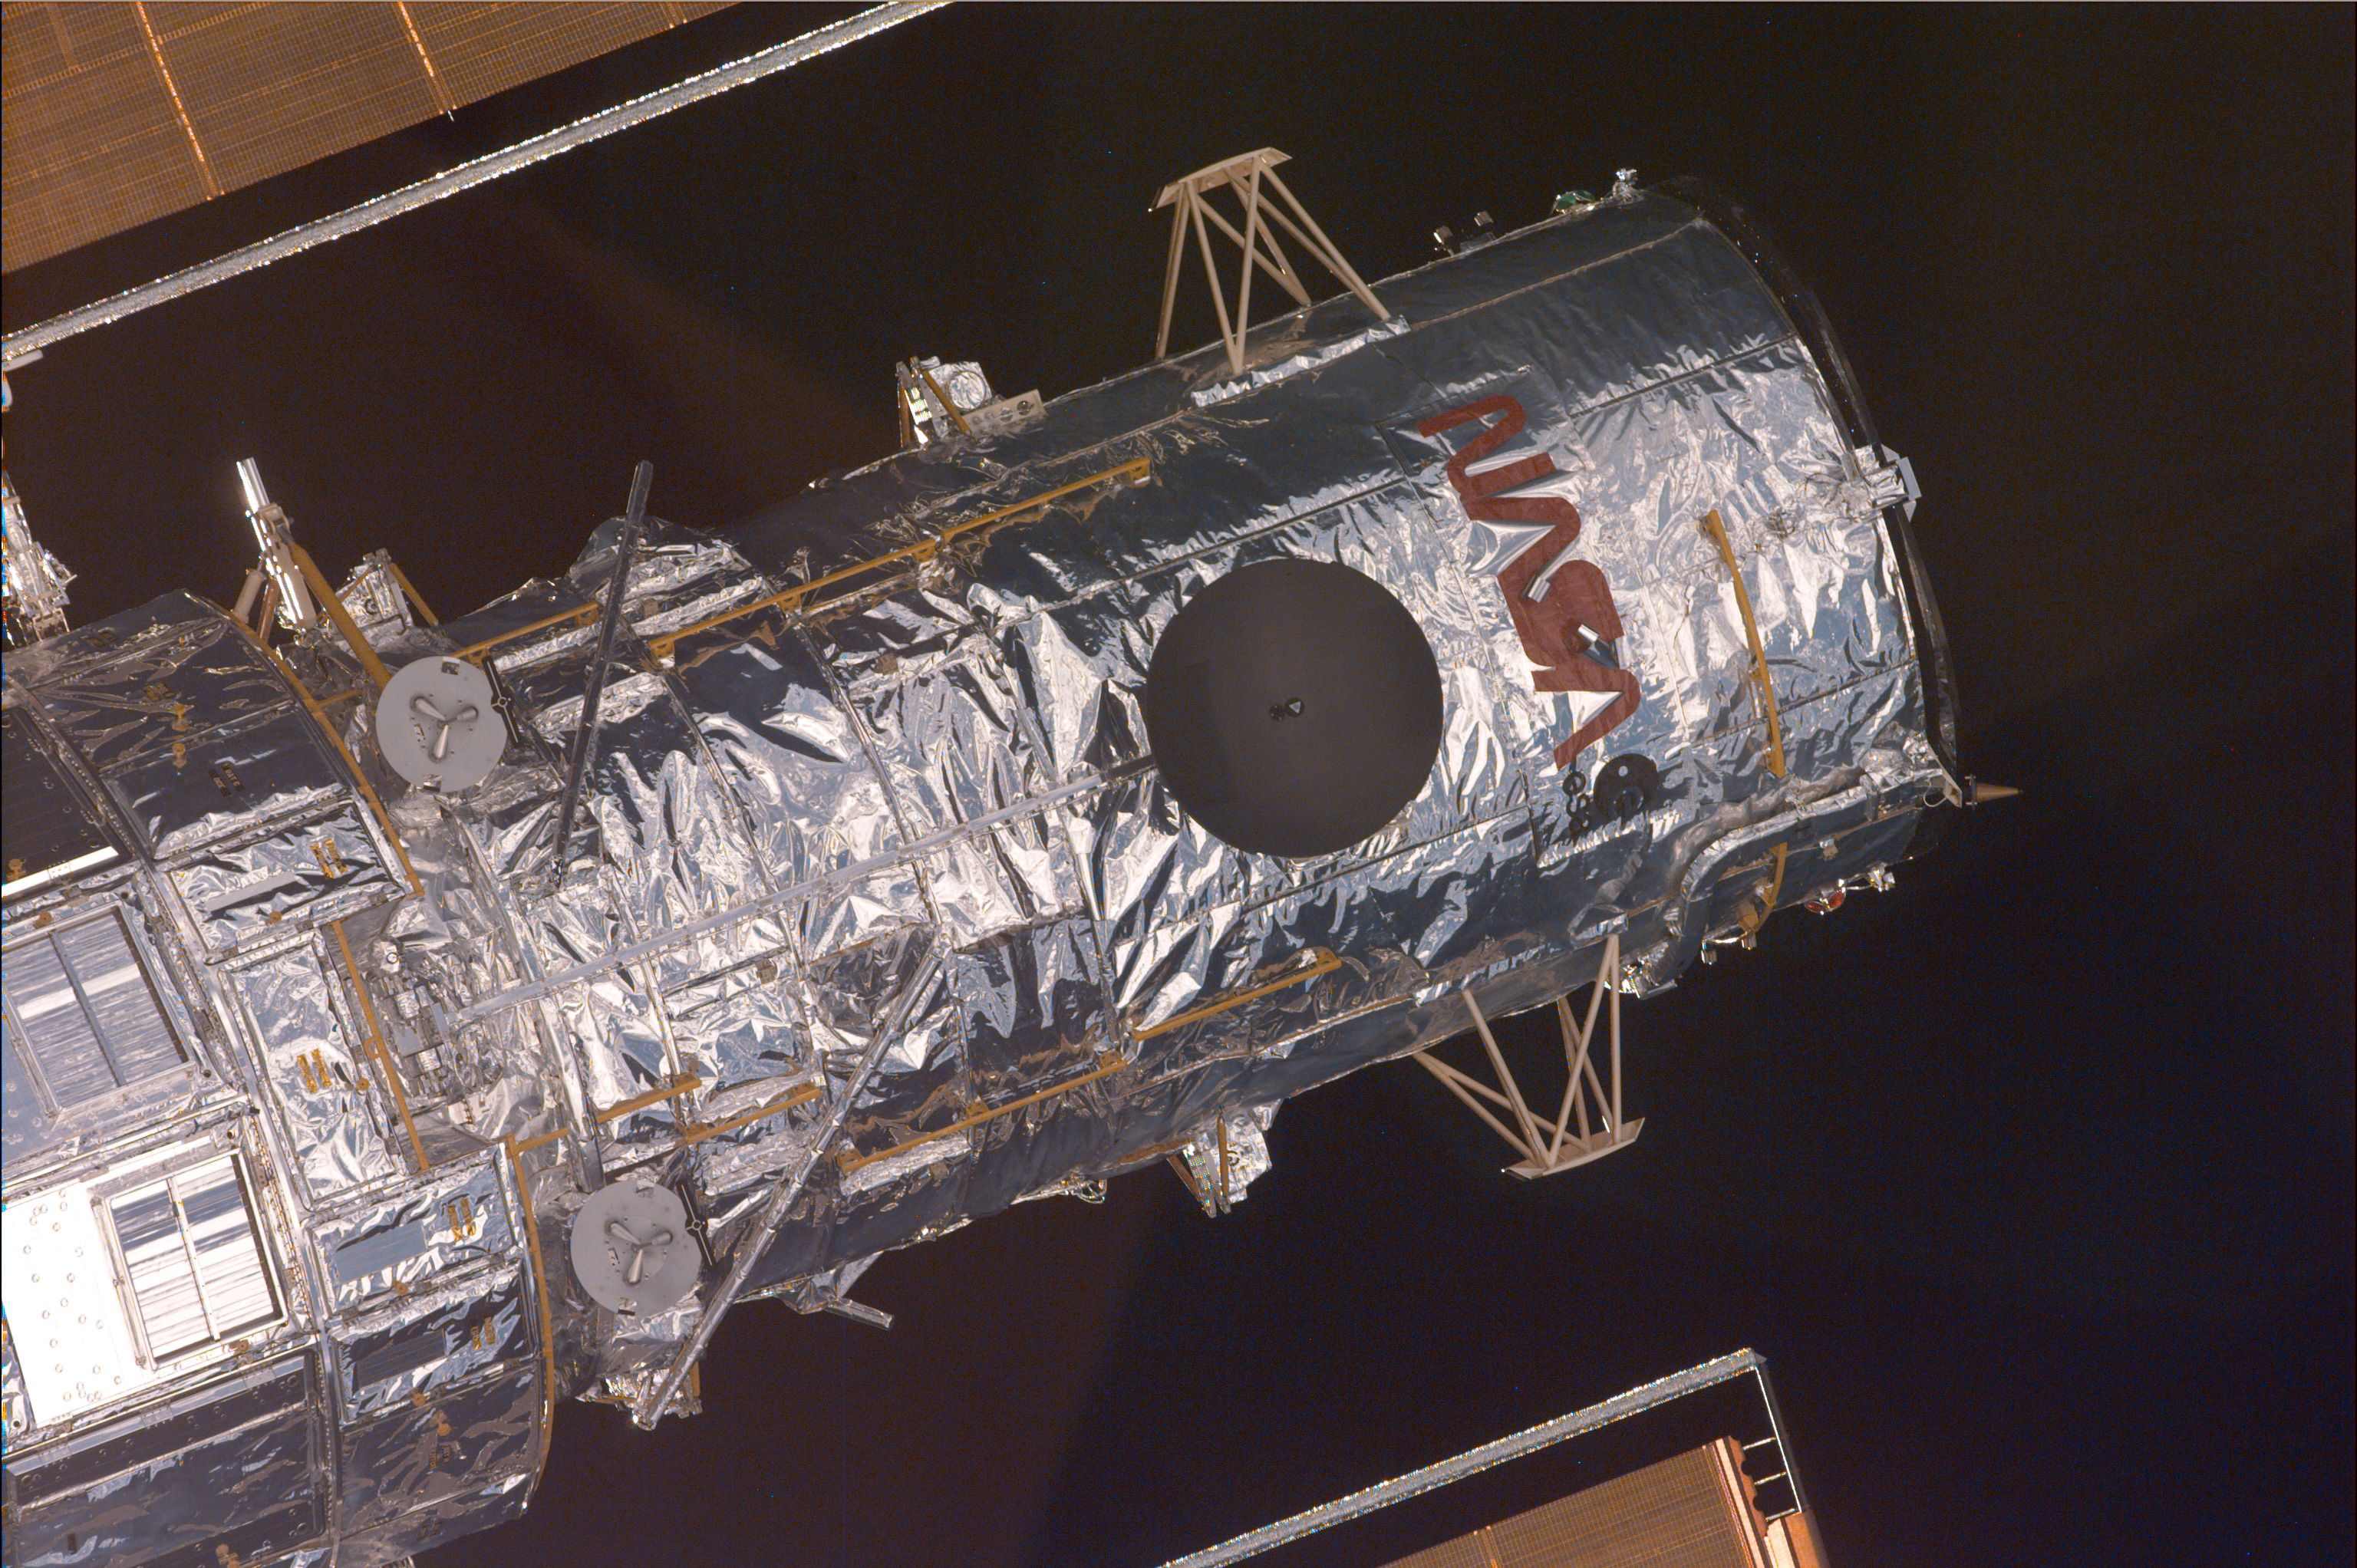

Pre-Grapple Close-Up Image of Hubble

This is the final of a series of four pre-grapple images of the Hubble Space Telescope (HST) recorded by the astronauts onboard the Space Shuttle Discovery.

Credit: NASA/ESA